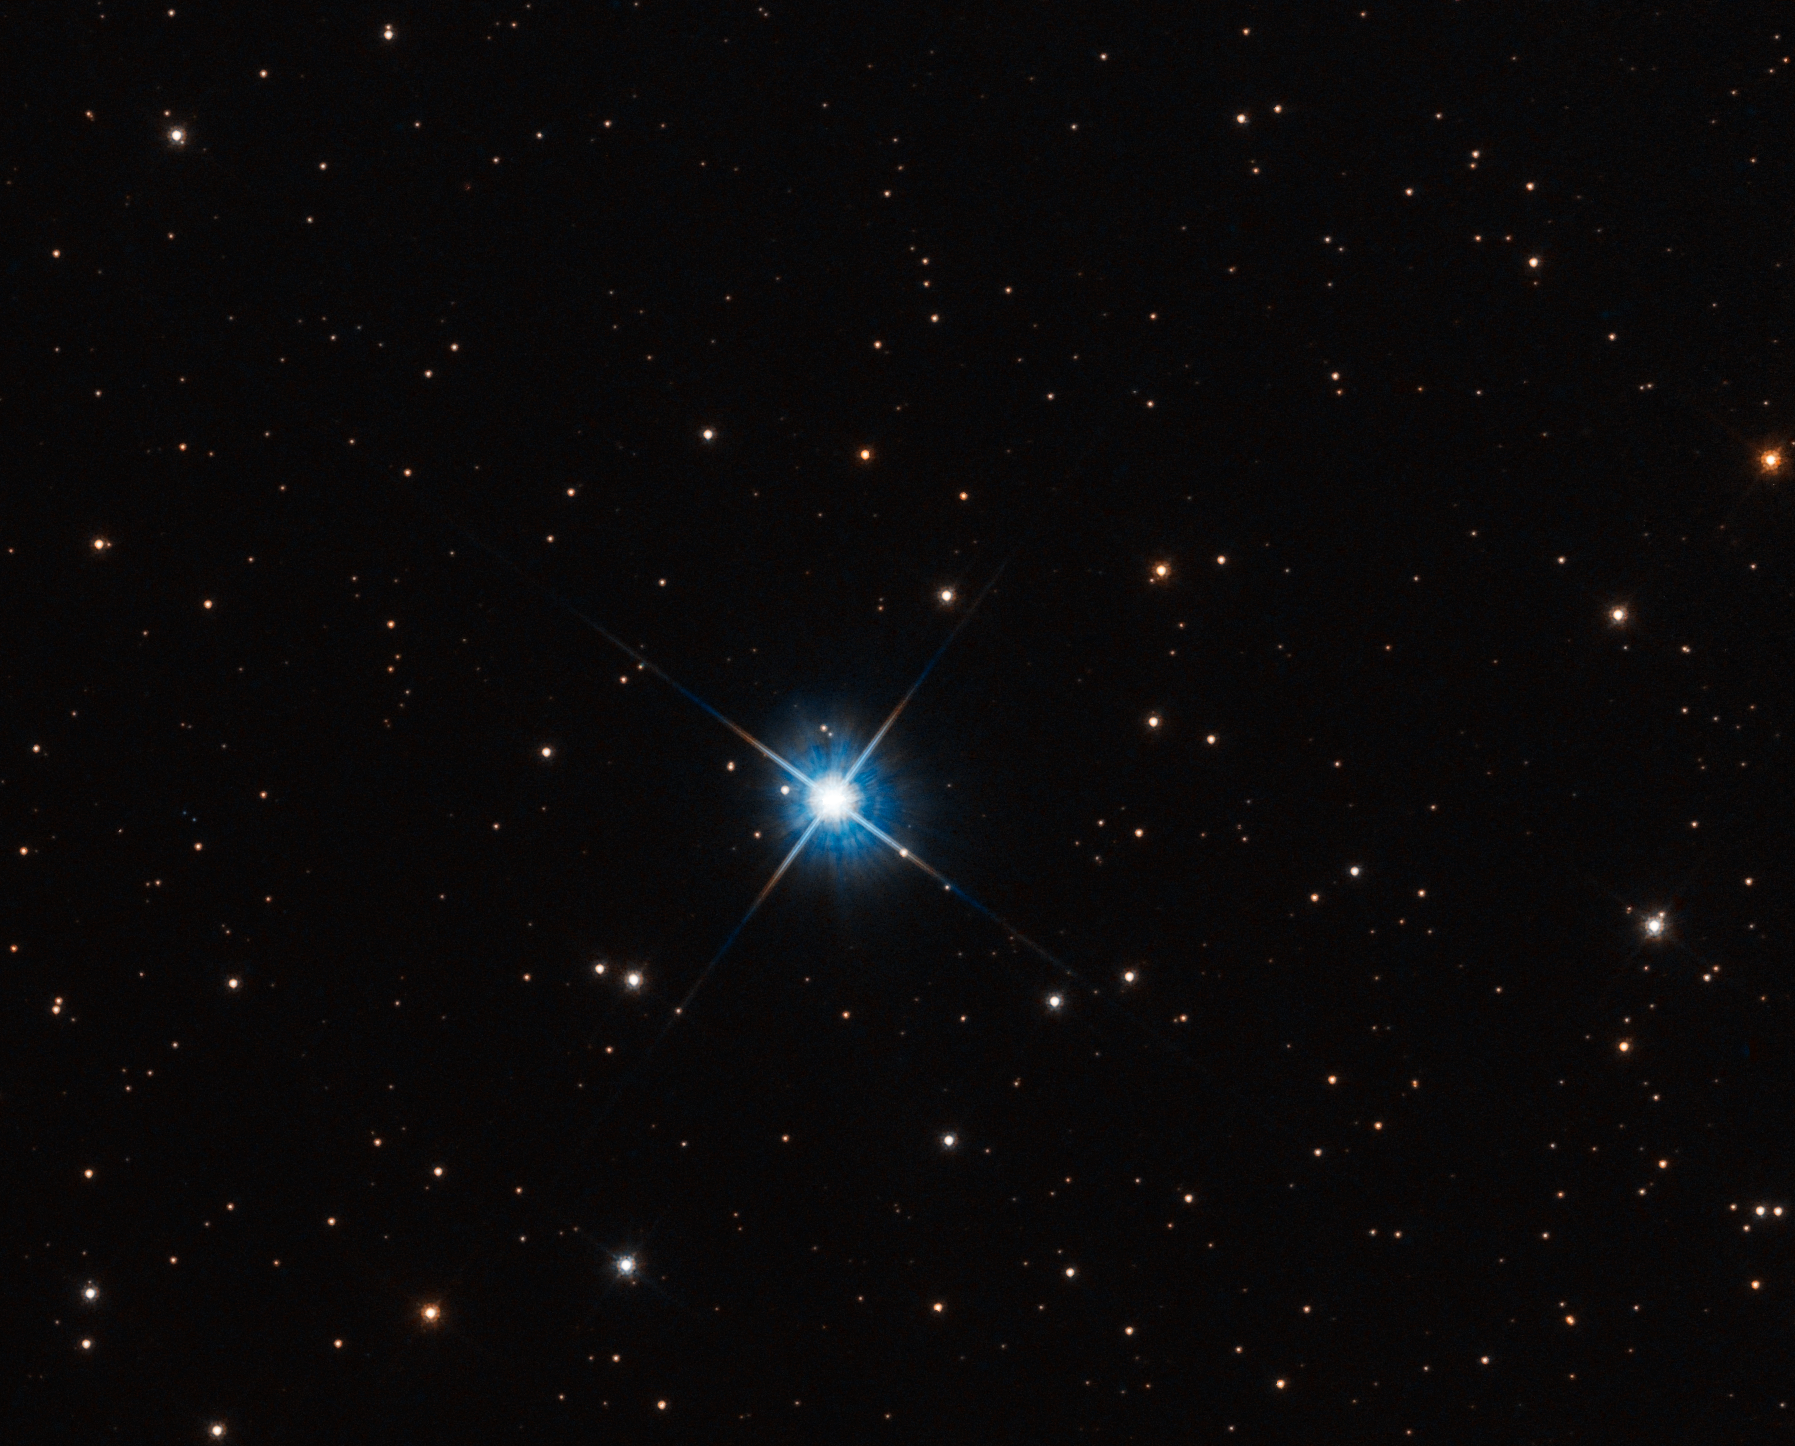

LAWD 37

Hubble has used microlensing to measure the mass of a white dwarf star.

The dwarf, called LAWD 37, is a burned-out star in the centre of this NASA/ESA Hubble Space Telescope image. Though its nuclear fusion furnace has shut down, trapped heat is sizzling on the surface at roughly 100 000 degrees Celsius, causing the stellar remnant to glow fiercely.

The white dwarf has a ‘spike’ because it is so bright that the light ‘bled’ into the Hubble camera’s CCD detector. This interfered with one of the observing dates for measuring that background star’s position on the sky.

Credit: NASA, ESA, P. McGill (Univ. of California, Santa Cruz and University of Cambridge), K. Sahu (STScI), J. Depasquale (STScI)